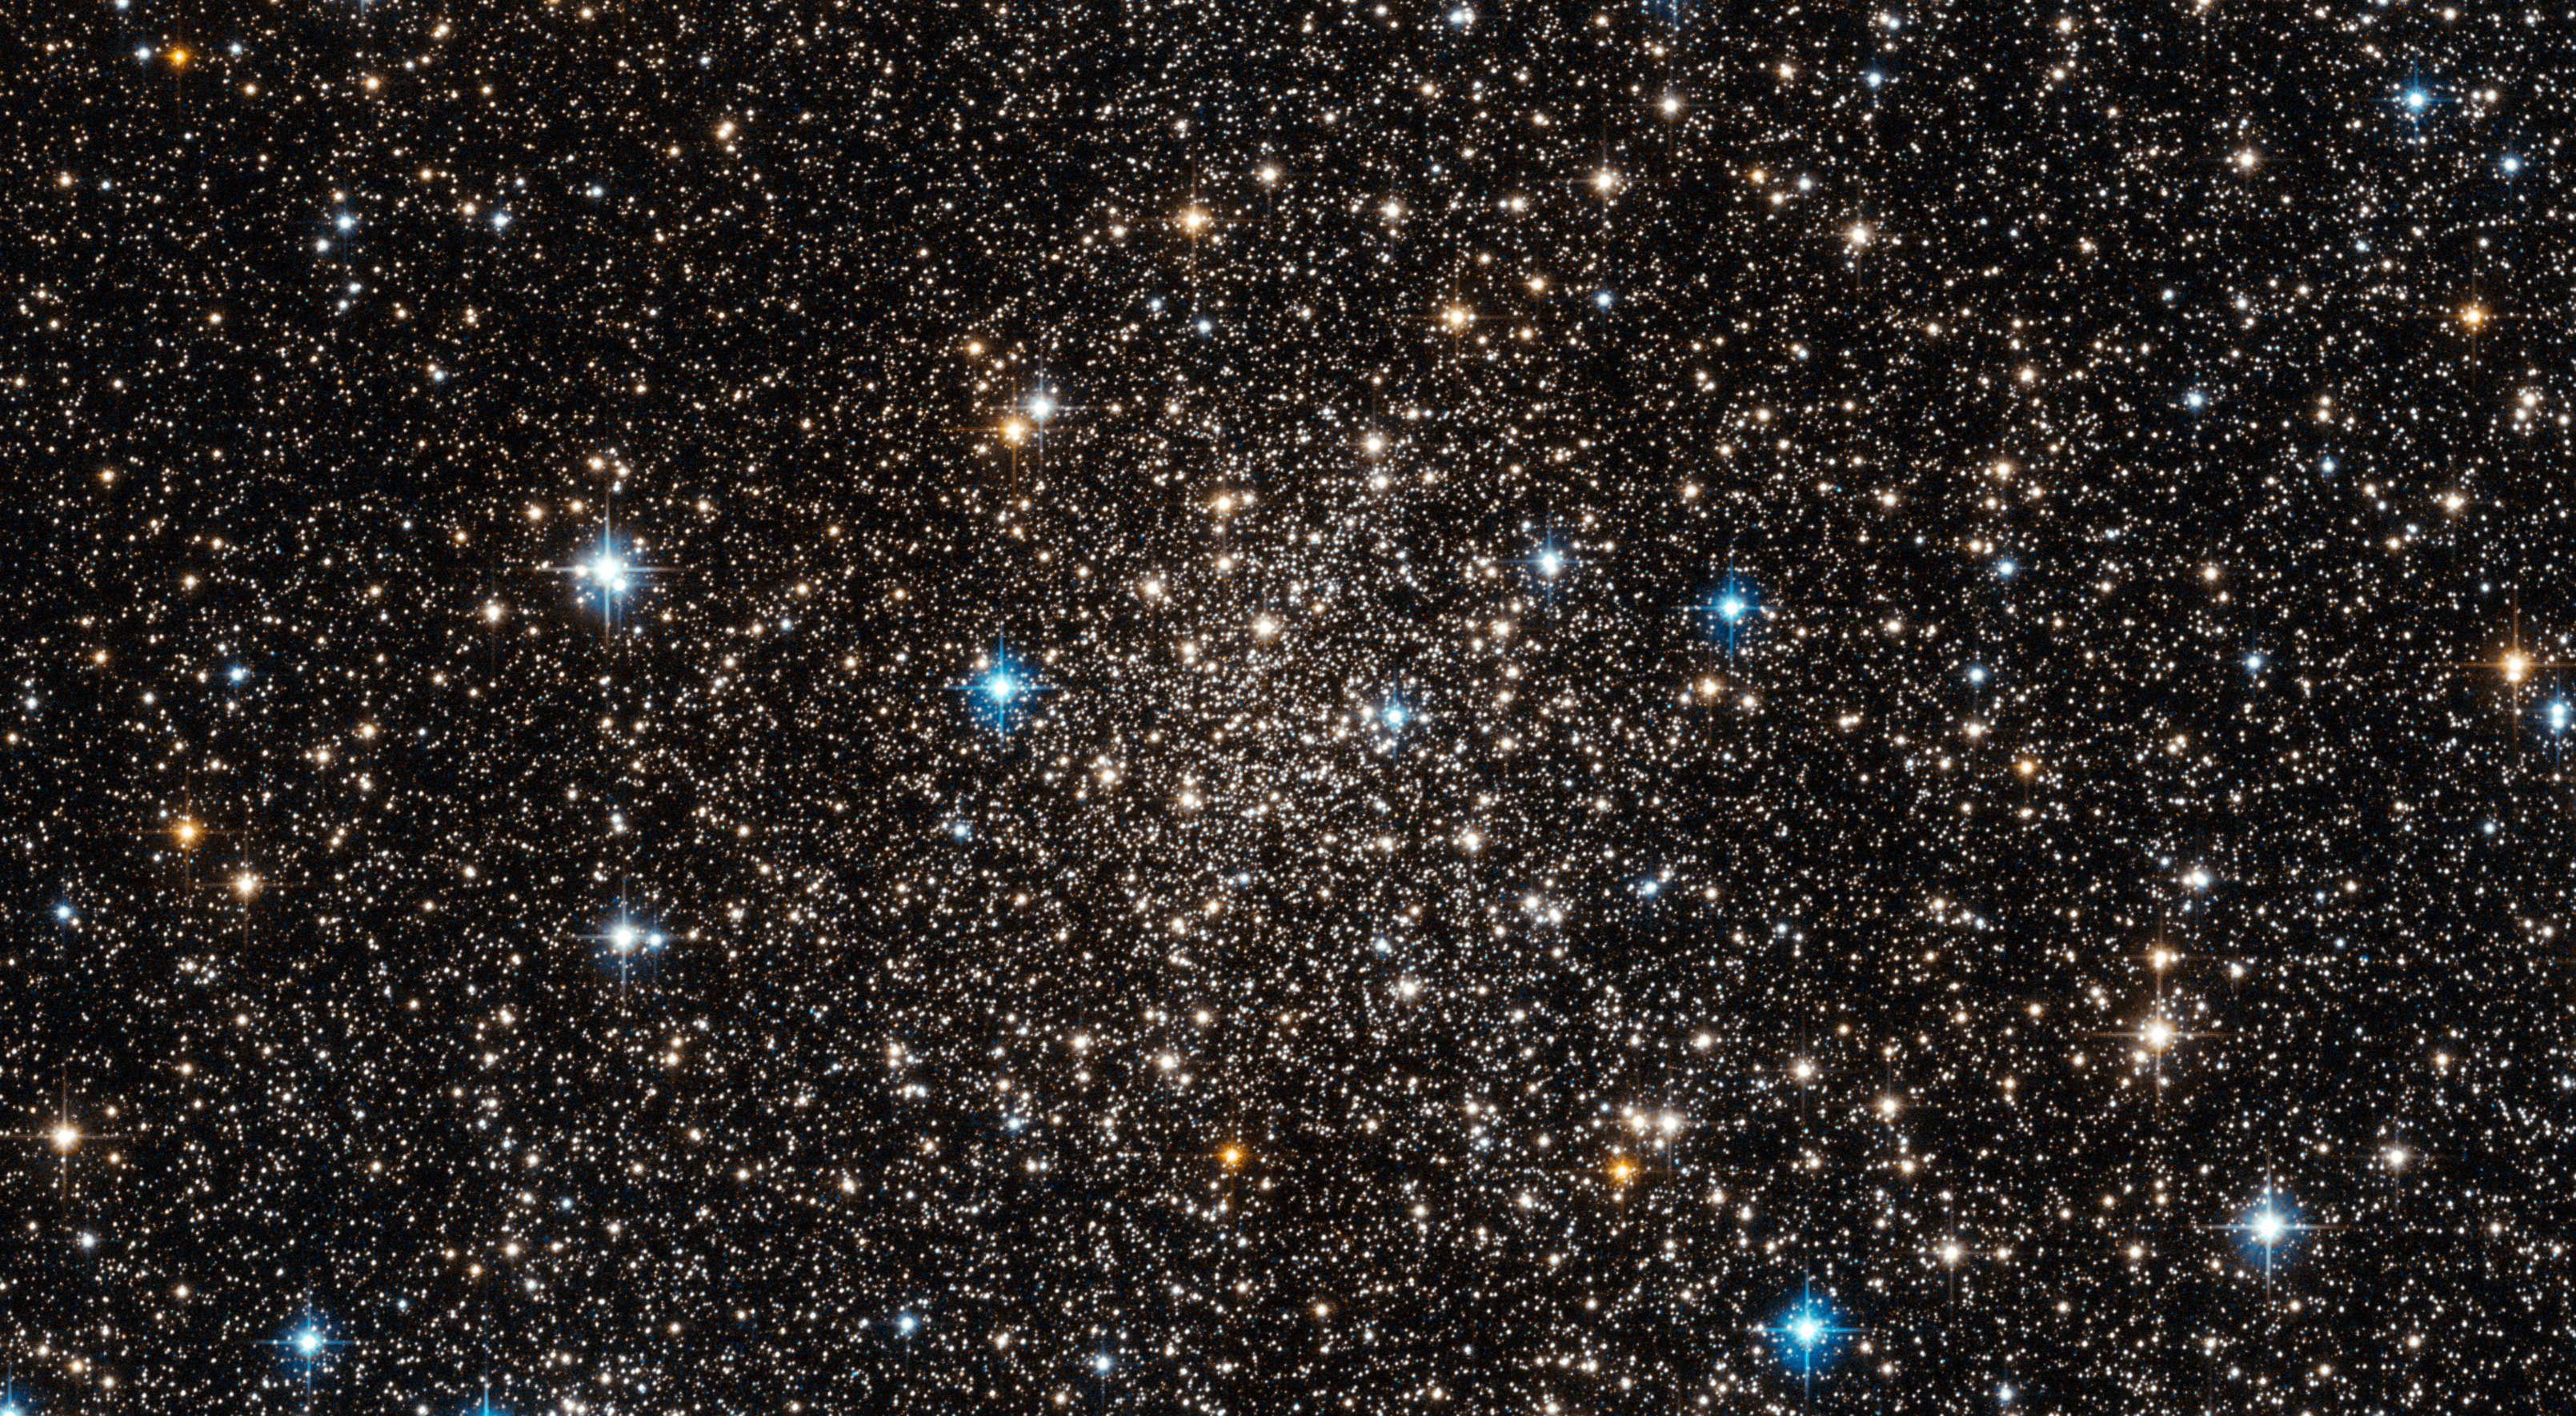

Engulfed by stars near the Milky Way’s heart

The NASA/ESA Hubble Space Telescope has imaged an area so jam-packed with stars that they almost overwhelm the inky blackness of space. This includes the globular star cluster Djorgovski 1, which was only discovered in 1987

Djorgovski 1 is located close to the centre of our Milky Way Galaxy, within the bulge. If the galaxy is thought of as being like a city, then this bulge is the very busiest district at its centre. Djorgovski 1's proximity to this hub — within just a few degrees — explains why the picture is teeming with stars.

Globular clusters like Djorgovski 1 formed early in the Milky Way's history, and as such may hold clues about the inner galaxy’s early evolution. However, with so much material in the way, obtaining accurate data is problematic. To make matters worse, these stars are faint. Even the most luminous stars in Djorgovski 1 are fainter than the brightest giant stars in the bulge.

Another quandary is apparent: how do you know which stars belong to Djorgovski 1, and which are from the bulge? To determine this, astronomers have studied the chemical composition of numerous stars in the area. Stars with a similar composition likely belong in the same group, like siblings in a family. This technique has successfully provided the information to distinguish between stars in Djorgovski 1 and the surrounding bulge.

These studies also reveal that Djorgovski 1’s stars contain hydrogen and helium, but not much else. In astronomical terms, they are described as “metal-poor”. In fact, it appears that Djorgovski 1 is one of the most metal-poor clusters in the inner galaxy. It is not clear why this is the case, but additional research may shed light on the issue.

This picture was created from multiple images taken with the Wide Field Camera of Hubble’s Advanced Camera for Surveys. Exposures through a yellow/orange filter (F606W) are coloured blue and images through a near-infrared filter (F814W) are shown as red. The total exposure times per filter are 340 s and 360 s, respectively, and the field of view is 2.7 by 1.5 arcminutes in extent.

Credit: ESA/Hubble & NASA